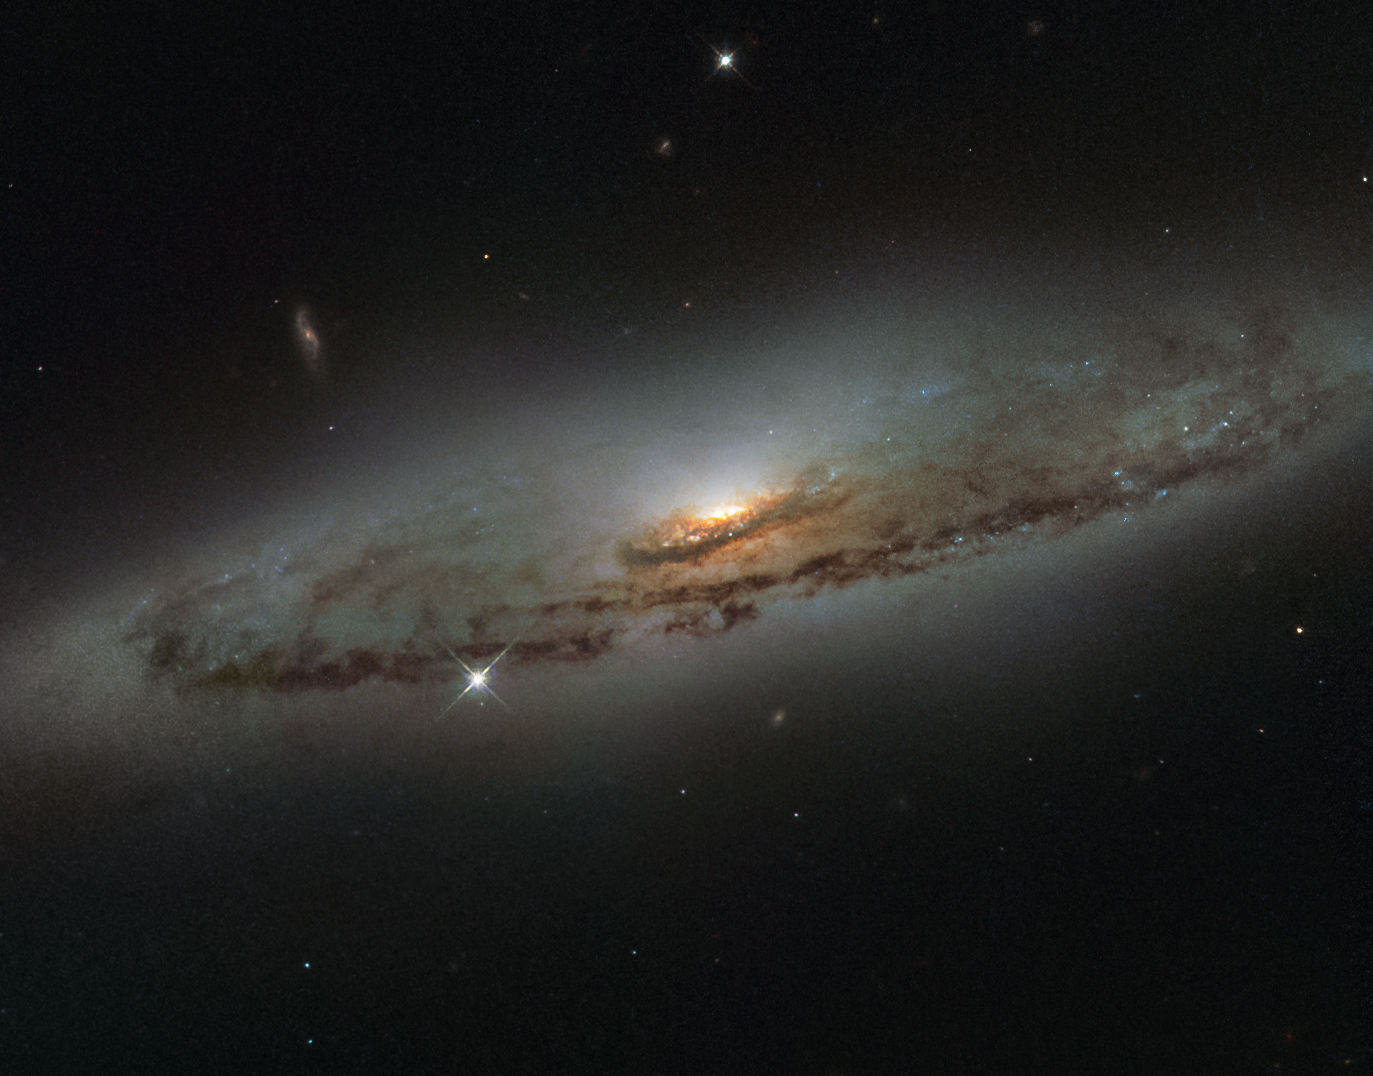

Supermassive and super-hungry

This NASA/ESA Hubble Space Telescope image shows the spiral galaxy NGC 4845, located over 65 million light-years away in the constellation of Virgo (The Virgin). The galaxy’s orientation clearly reveals the galaxy’s striking spiral structure: a flat and dust-mottled disc surrounding a bright galactic bulge.

NGC 4845’s glowing centre hosts a gigantic version of a black hole, known as a supermassive black hole. The presence of a black hole in a distant galaxy like NGC 4845 can be inferred from its effect on the galaxy’s innermost stars; these stars experience a strong gravitational pull from the black hole and whizz around the galaxy’s centre much faster than otherwise.

From investigating the motion of these central stars, astronomers can estimate the mass of the central black hole — for NGC 4845 this is estimated to be hundreds of thousands times heavier than the Sun. This same technique was also used to discover the supermassive black hole at the centre of our own Milky Way — Sagittarius A* — which hits some four million times the mass of the Sun (potw1340a).

The galactic core of NGC 4845 is not just supermassive, but also super-hungry. In 2013 researchers were observing another galaxy when they noticed a violent flare at the centre of NGC 4845. The flare came from the central black hole tearing up and feeding off an object many times more massive than Jupiter. A brown dwarf or a large planet simply strayed too close and was devoured by the hungry core of NGC 4845.

Credit: ESA/Hubble & NASA and S. Smartt (Queen's University Belfast)